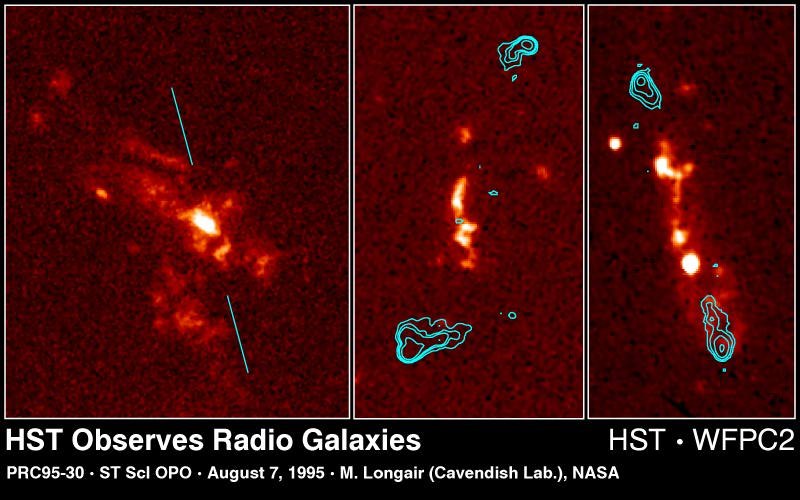

Radio galaxies

These Hubble Space Telescope images, combined with radio maps produced by the Very Large Array Radio Interferometer (blue contour lines), show surprisingly varied and intricate structures of gas and stars that suggest the mechanisms powering radio galaxies are more complex than thought previously.

Left Image

3C265. Hubble resolves numerous bright star clusters or dwarf 'satellite' galaxies surrounding a bright central compact structure. The line corresponds to the axis of the galaxy's radio emissions, which unlike other radio galaxies, is in a different direction from the optical region.

Center Image

3C324. A number of small interacting components are distributed roughly along the radio axis in this source. Comparison of the Hubble image with that from the United Kingdom Infrared Telescope suggests that the central regions of this galaxy are obscured by a large dust lane.

Right Image

3C368. One of the best studied radio galaxies, this image is composed of a very smooth cigar-shaped emission region closely aligned with the radio axis, upon which is superimposed a string of bright knots that might be stars or dust.

Credit: M. Longair (Cambridge University, England), NASA/ESA, and NRAO